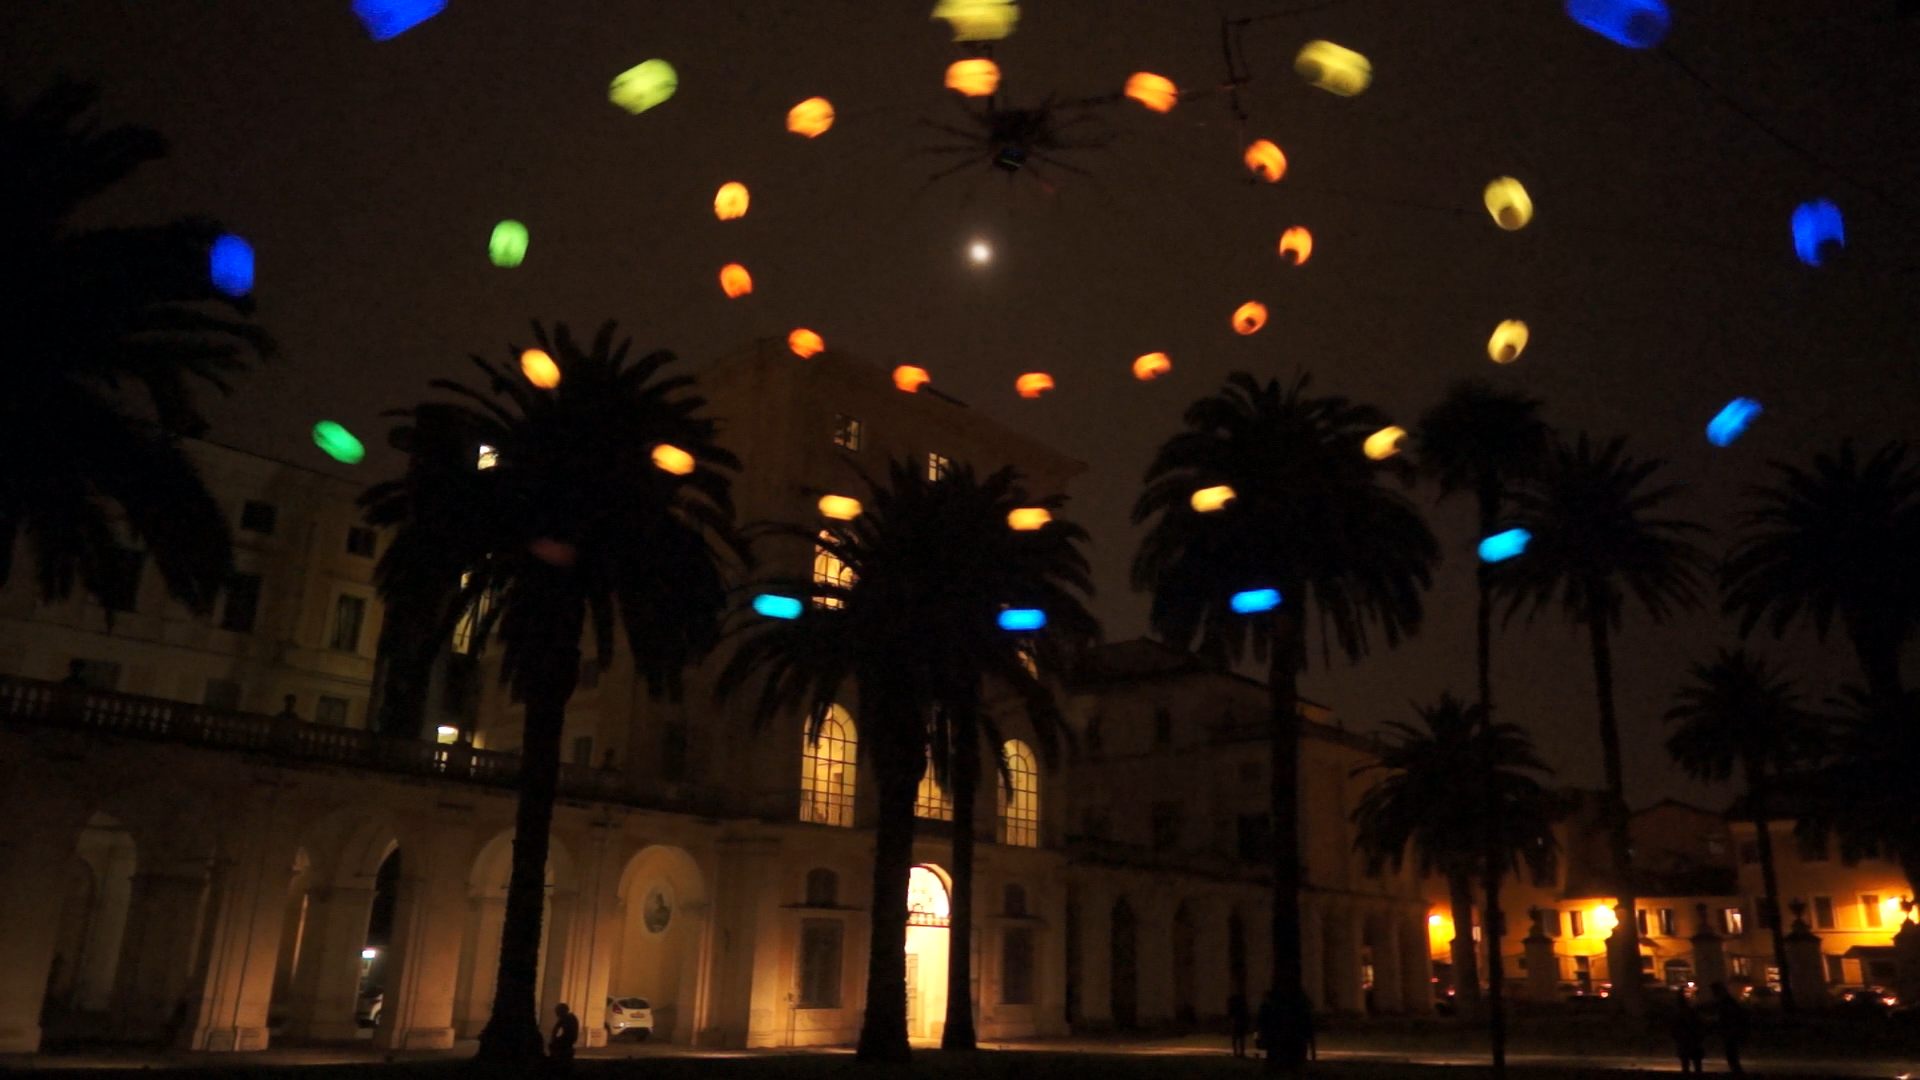

Screenshot of Hubblecast 74

Screenshot of Hubblecast 74: Hubble and Heaven’s Carousel

Credit: NASA & ESA